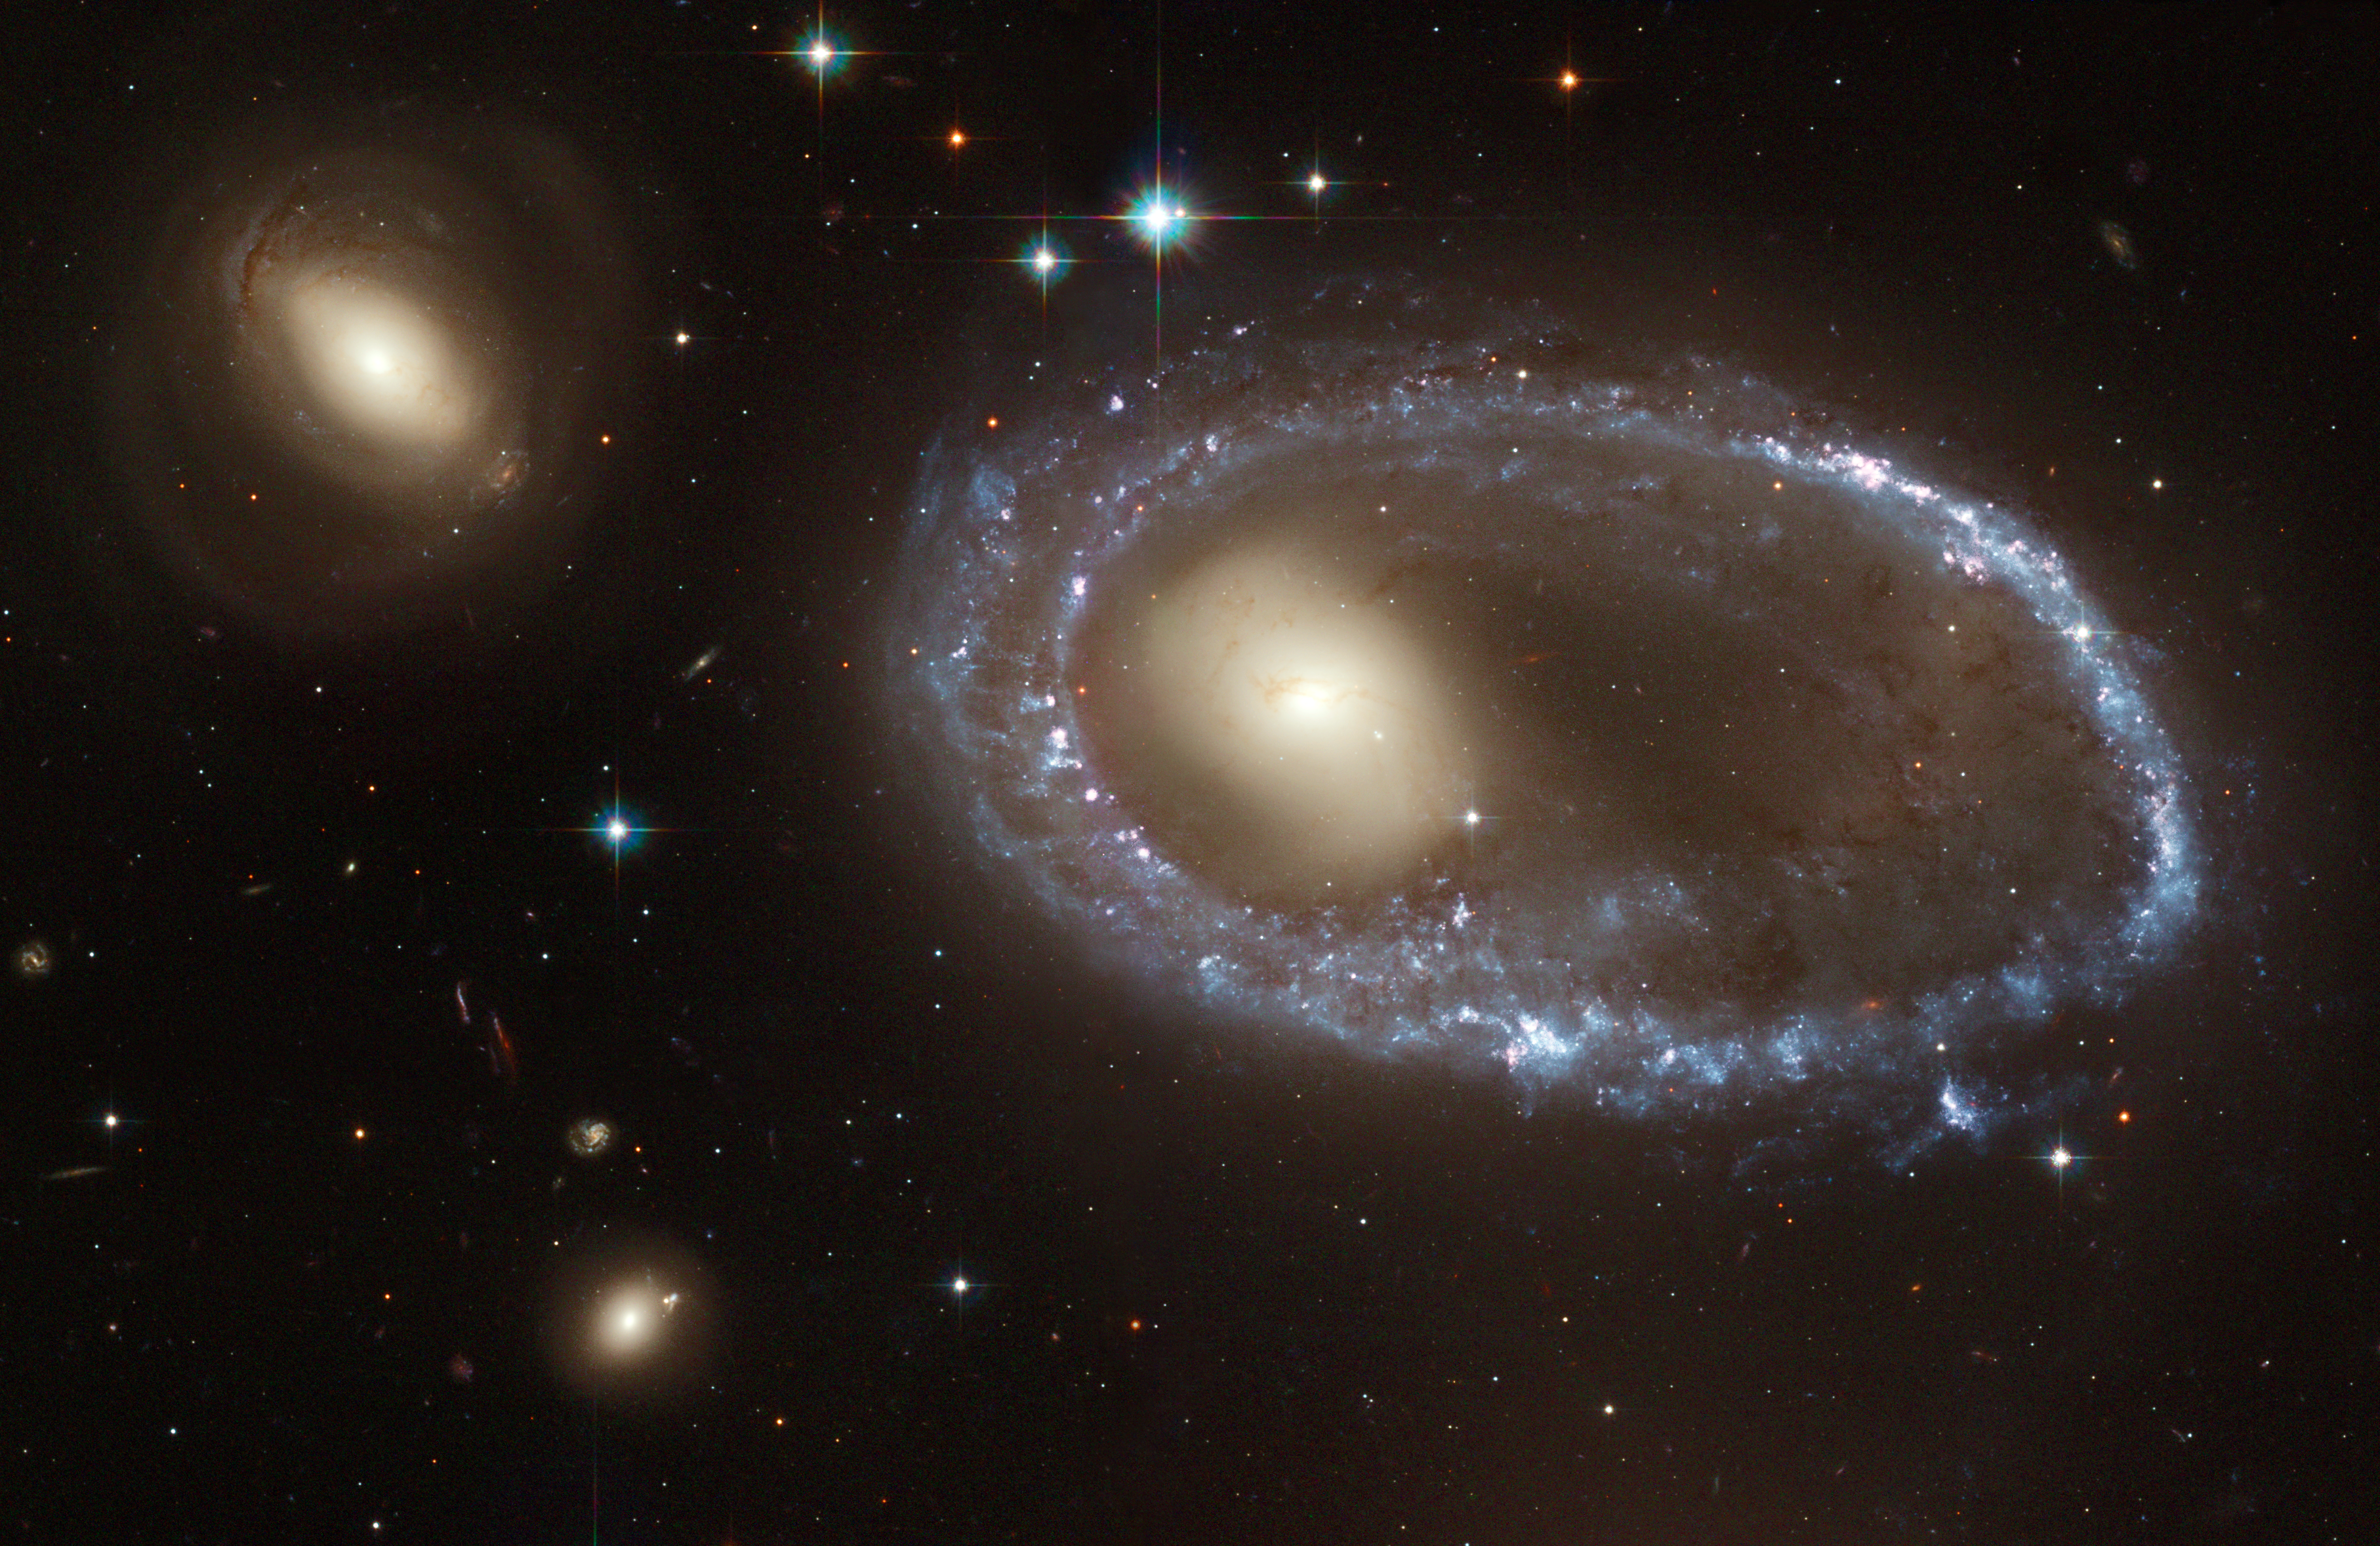

The lure of the rings

Resembling a diamond-encrusted bracelet, a ring of brilliant blue star clusters wraps around the yellowish nucleus of what was once a normal spiral galaxy in this new image from the NASA/ESA Hubble Space Telescope (HST). This image is being released to commemorate the 14th anniversary of Hubble's launch on April 24, 1990 and its deployment from the space shuttle Discovery on April 25, 1990.

The sparkling blue ring is 150,000 light-years in diameter, making it larger than our entire home galaxy, the Milky Way. The galaxy, cataloged as AM 0644-741, is a member of the class of so- called "ring galaxies." It lies 300 million light-years away in the direction of the southern constellation Dorado.

Credit: NASA, ESA, and The Hubble Heritage Team (AURA/STScI)